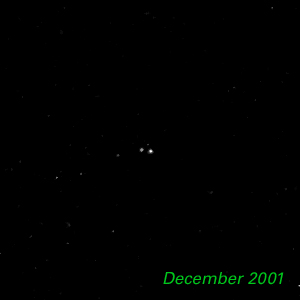

December 2001- Kuiper Belt Object 1998 WW31

The Hubble Space Telescope is hot on the trail of a puzzling new class of solar system object that might be called a Pluto "mini-me." Together, these objects are 5,000 times less massive than Pluto and Charon. Like Pluto and Charon, these dim and fleeting objects travel in pairs in the frigid, mysterious outer realm of the solar system called the Kuiper Belt, a long-hypothesized "junkyard" of countless icy bodies left over from the solar system's formation. A total of seven binary Kuiper Belt objects have been seen so far by Hubble and ground-based observatories. Among them is a pair called 1998 WW31, which the Hubble telescope studied in detail.

Credit: NASA & ESA